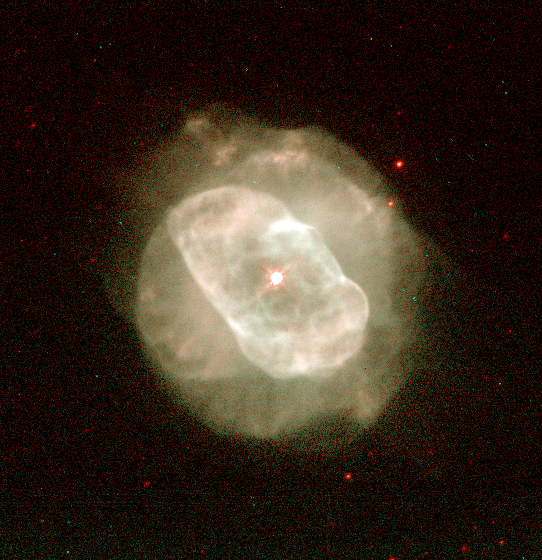

NGC 5882

This image is a part of the Hubble Gallery of Planetary Nebulae.

Credit: Howard Bond (ST ScI) and NASA/ESA